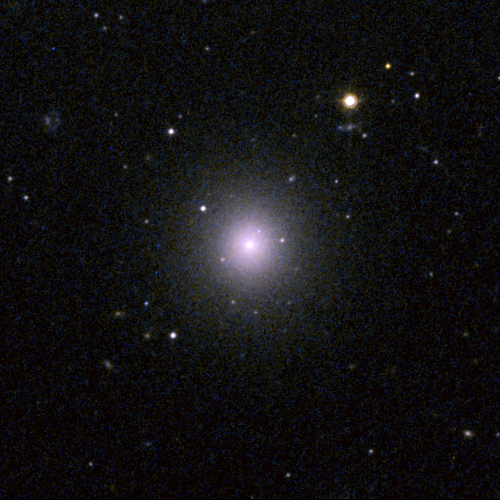

Perseus Dwarf Galaxy

This object, [CGW2003] J031910.4+4129, is one of four dwarf galaxies that is part of a census of small galaxies in the tumultuous heart of the nearby Perseus galaxy cluster.

The galaxies appear smooth and symmetrical, suggesting that they have not been tidally disrupted by the pull of gravity in the dense cluster environment. Larger galaxies around them, however, are being ripped apart by the gravitational tug of other galaxies.

The image, taken in 2005 by NASA/ESA’s Hubble Space Telescope, is an evidence that the undisturbed galaxies are enshrouded by a "cushion" of dark matter, which protects them from their rough-and-tumble neighborhood.

Credit: NASA, ESA and C. Conselice (University of Nottingham, U.K.)